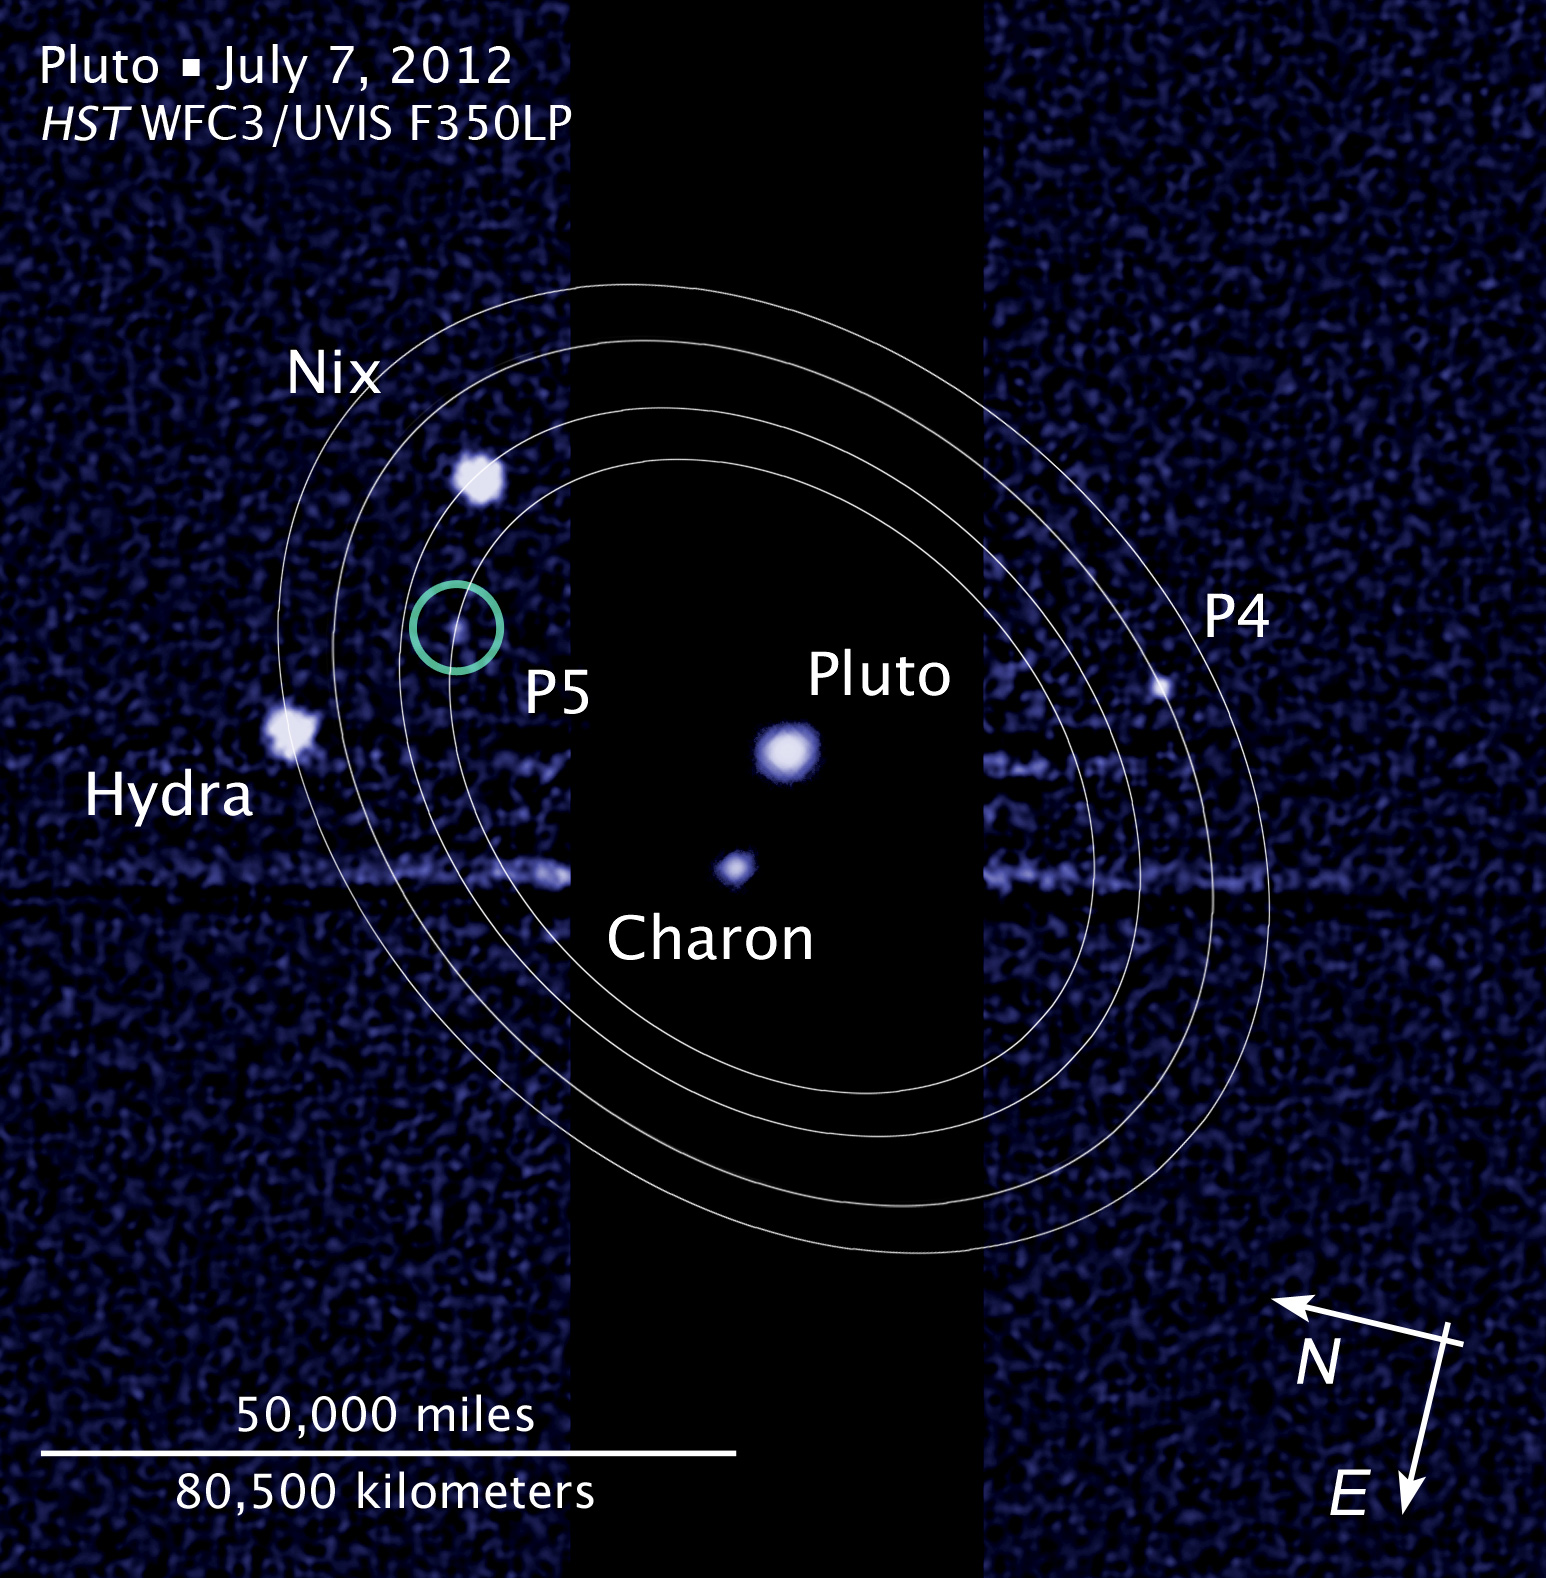

Compass and scale image of Pluto

This image, taken by the NASA/ESA Hubble Space Telescope, shows five moons orbiting the distant, icy dwarf planet Pluto.

The newly discovered small moon, designated P5, is the innermost of the moons found by Hubble over the past seven years.

The diagram shows that P5 is in a 93 000-kilometre-diameter circular orbit around Pluto that is assumed to be co-planar with the other satellites in the system.

Though Charon (discovered in 1978) is an even closer moon to Pluto, some astronomers consider the Pluto-Charon pair a "double planet" because of Charon's is 12 percent of Pluto's mass (by comparison our Moon is .01 percent Earth's mass).

This image was taken with Hubble's Wide Field Camera 3 on July 7.

Other observations that collectively show the moon's orbital motion were taken on 26, 27, and 29 June, 2012 and 9 July, 2012.

The new data will help scientists in their planning for the July 2015 flyby of Pluto by NASA's New Horizons spacecraft.

Credit: NASA, ESA, and L. Frattare (STScI). Science Credit: NASA, ESA, and M. Showalter (SETI Institute)